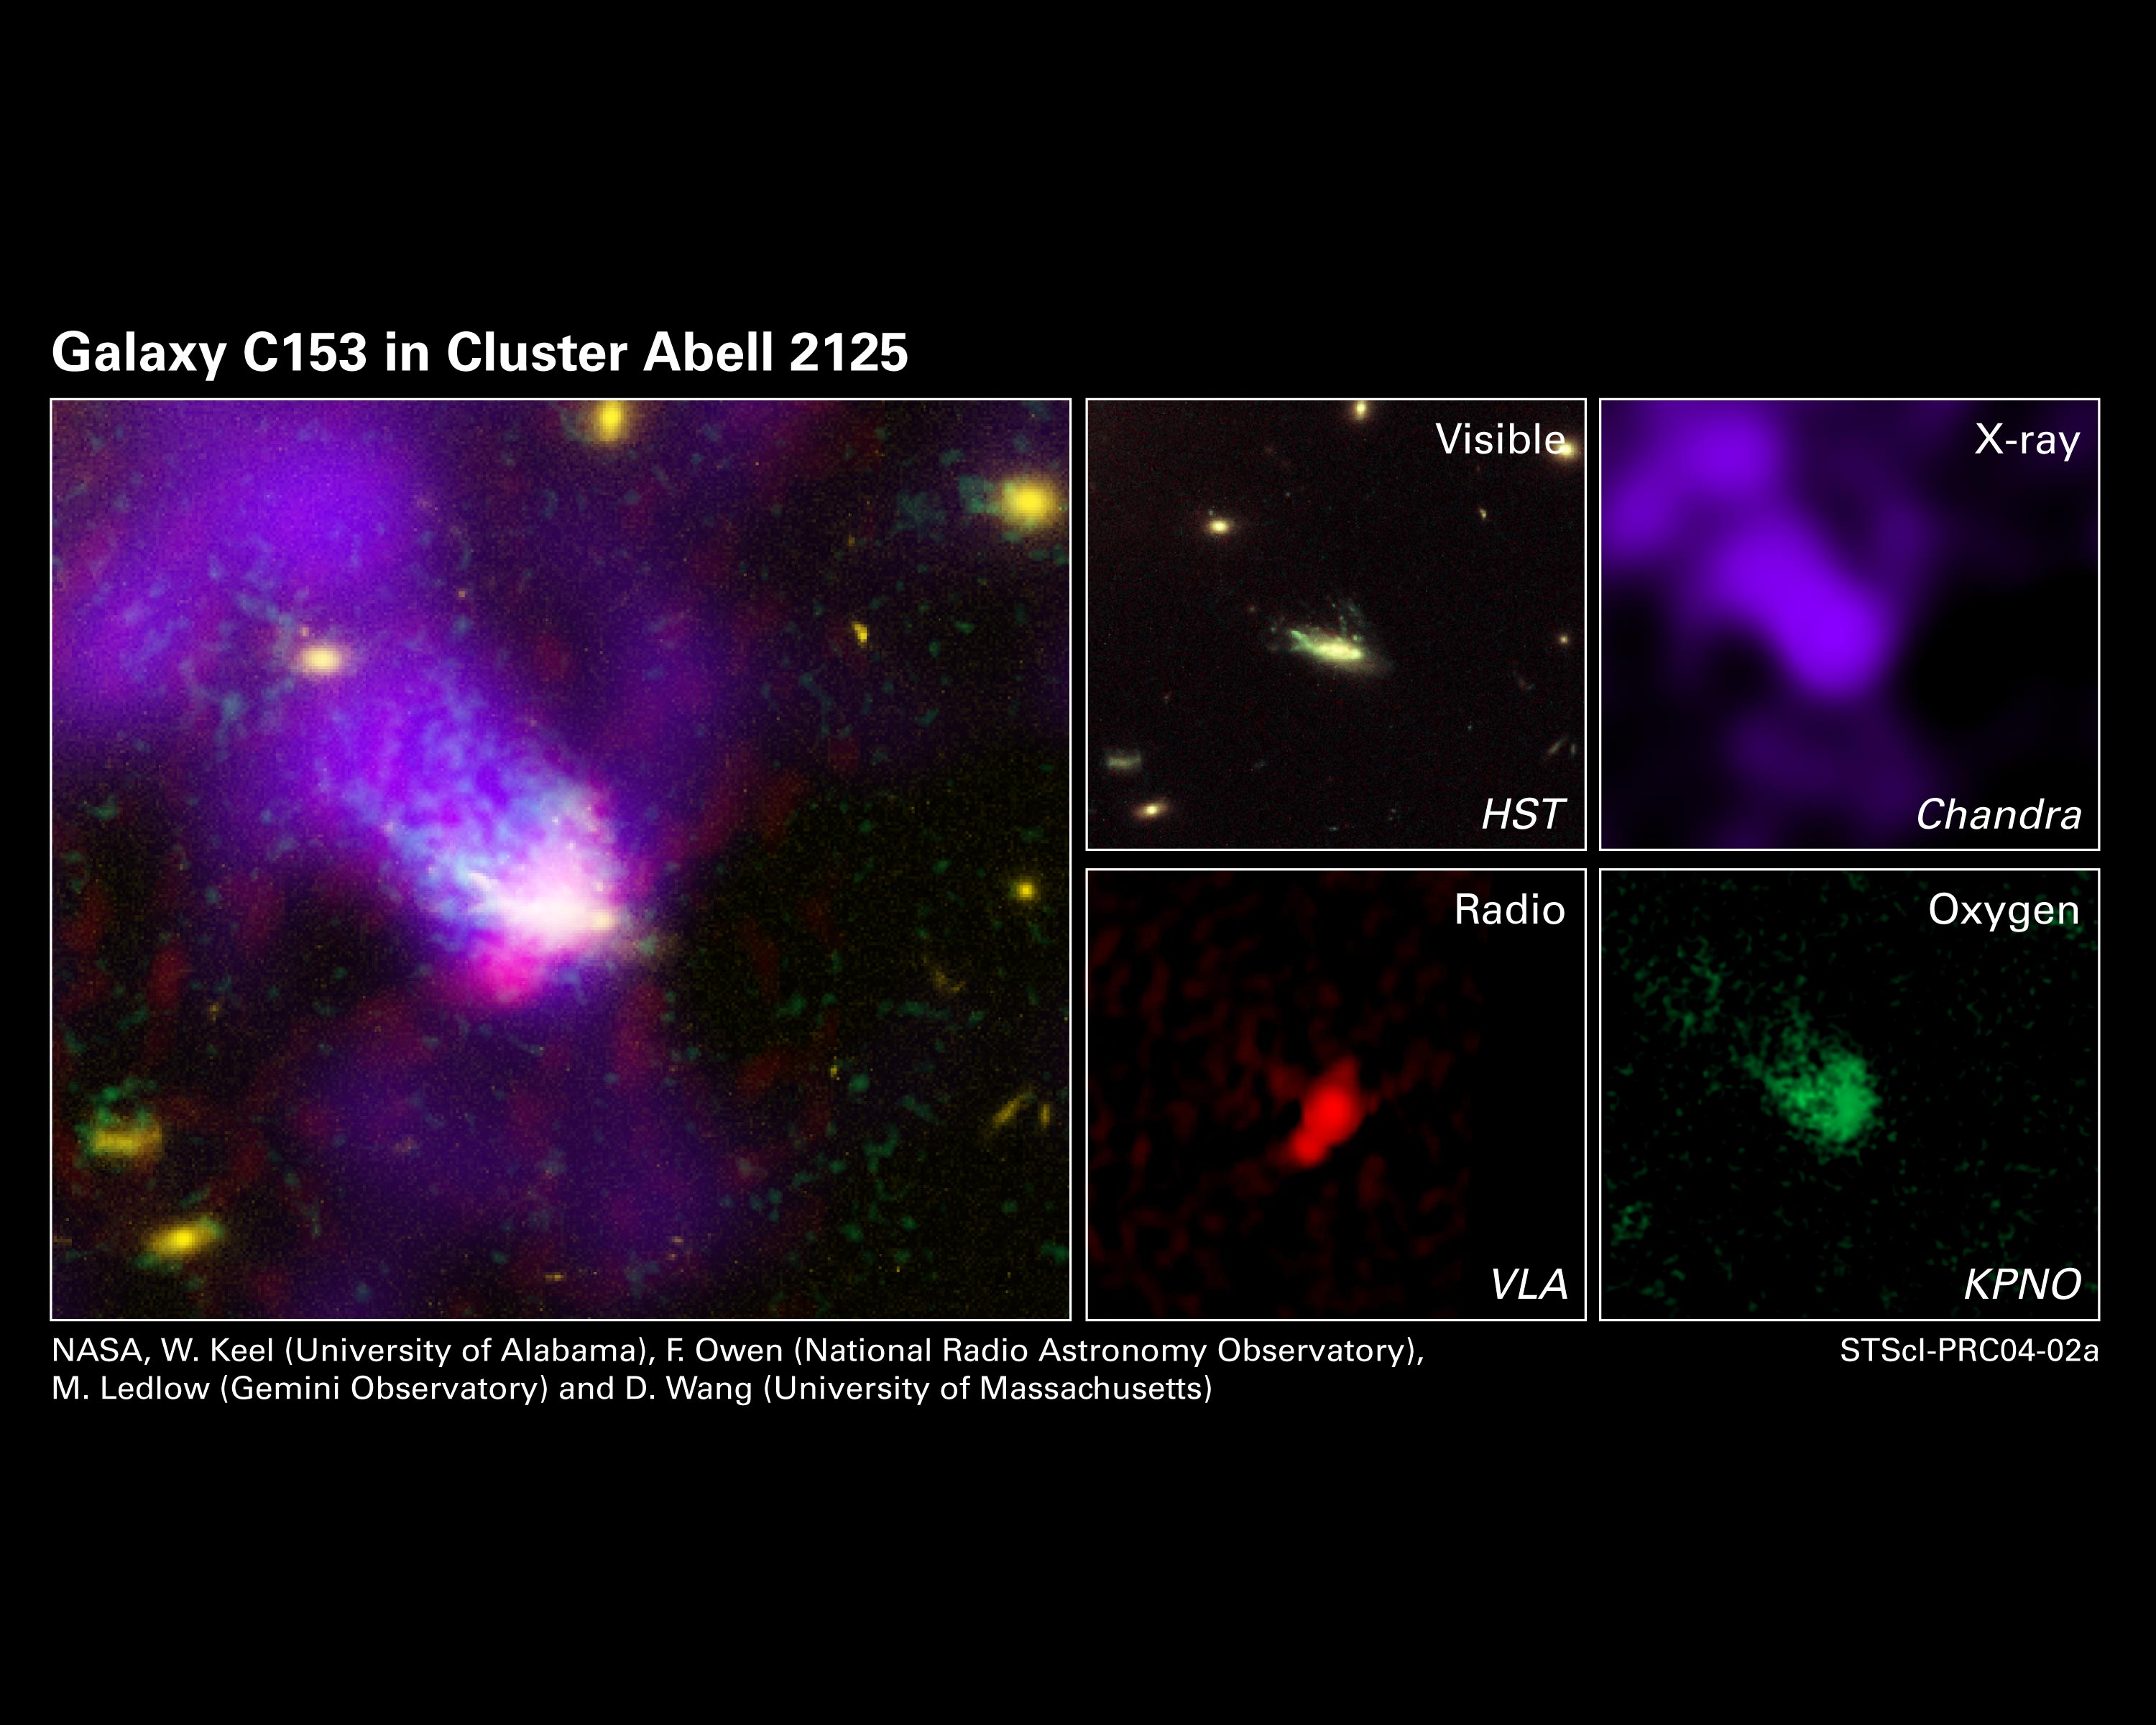

Too Fast, Too Furious: A Galaxy's Fatal Plunge

These images offer a dramatic look at a spiral galaxy like our Milky Way being ripped apart as it races at 4.5 million miles per hour (or more than 7 million kilometres per hour) through the heart of a distant cluster of galaxies. The images, taken over several wavelengths, provide evidence of the "galactic assault and battery," namely, gas being stripped from the doomed galaxy, called C153.

The composite photograph at left was made by combining the four images at right, taken in X-ray, radio, and visible wavelengths as well as the green light of oxygen gas. Astronomers studied the galaxy across several wavelengths to trace how stars, gas, and dust are being tossed around and torn from the fragile galaxy.

Credit: NASA/ESA, W. Keel (U Alabama), F. Owen (NRAO), M. Ledlow (Gemini Obs.), and D. Wang (U Mass.)